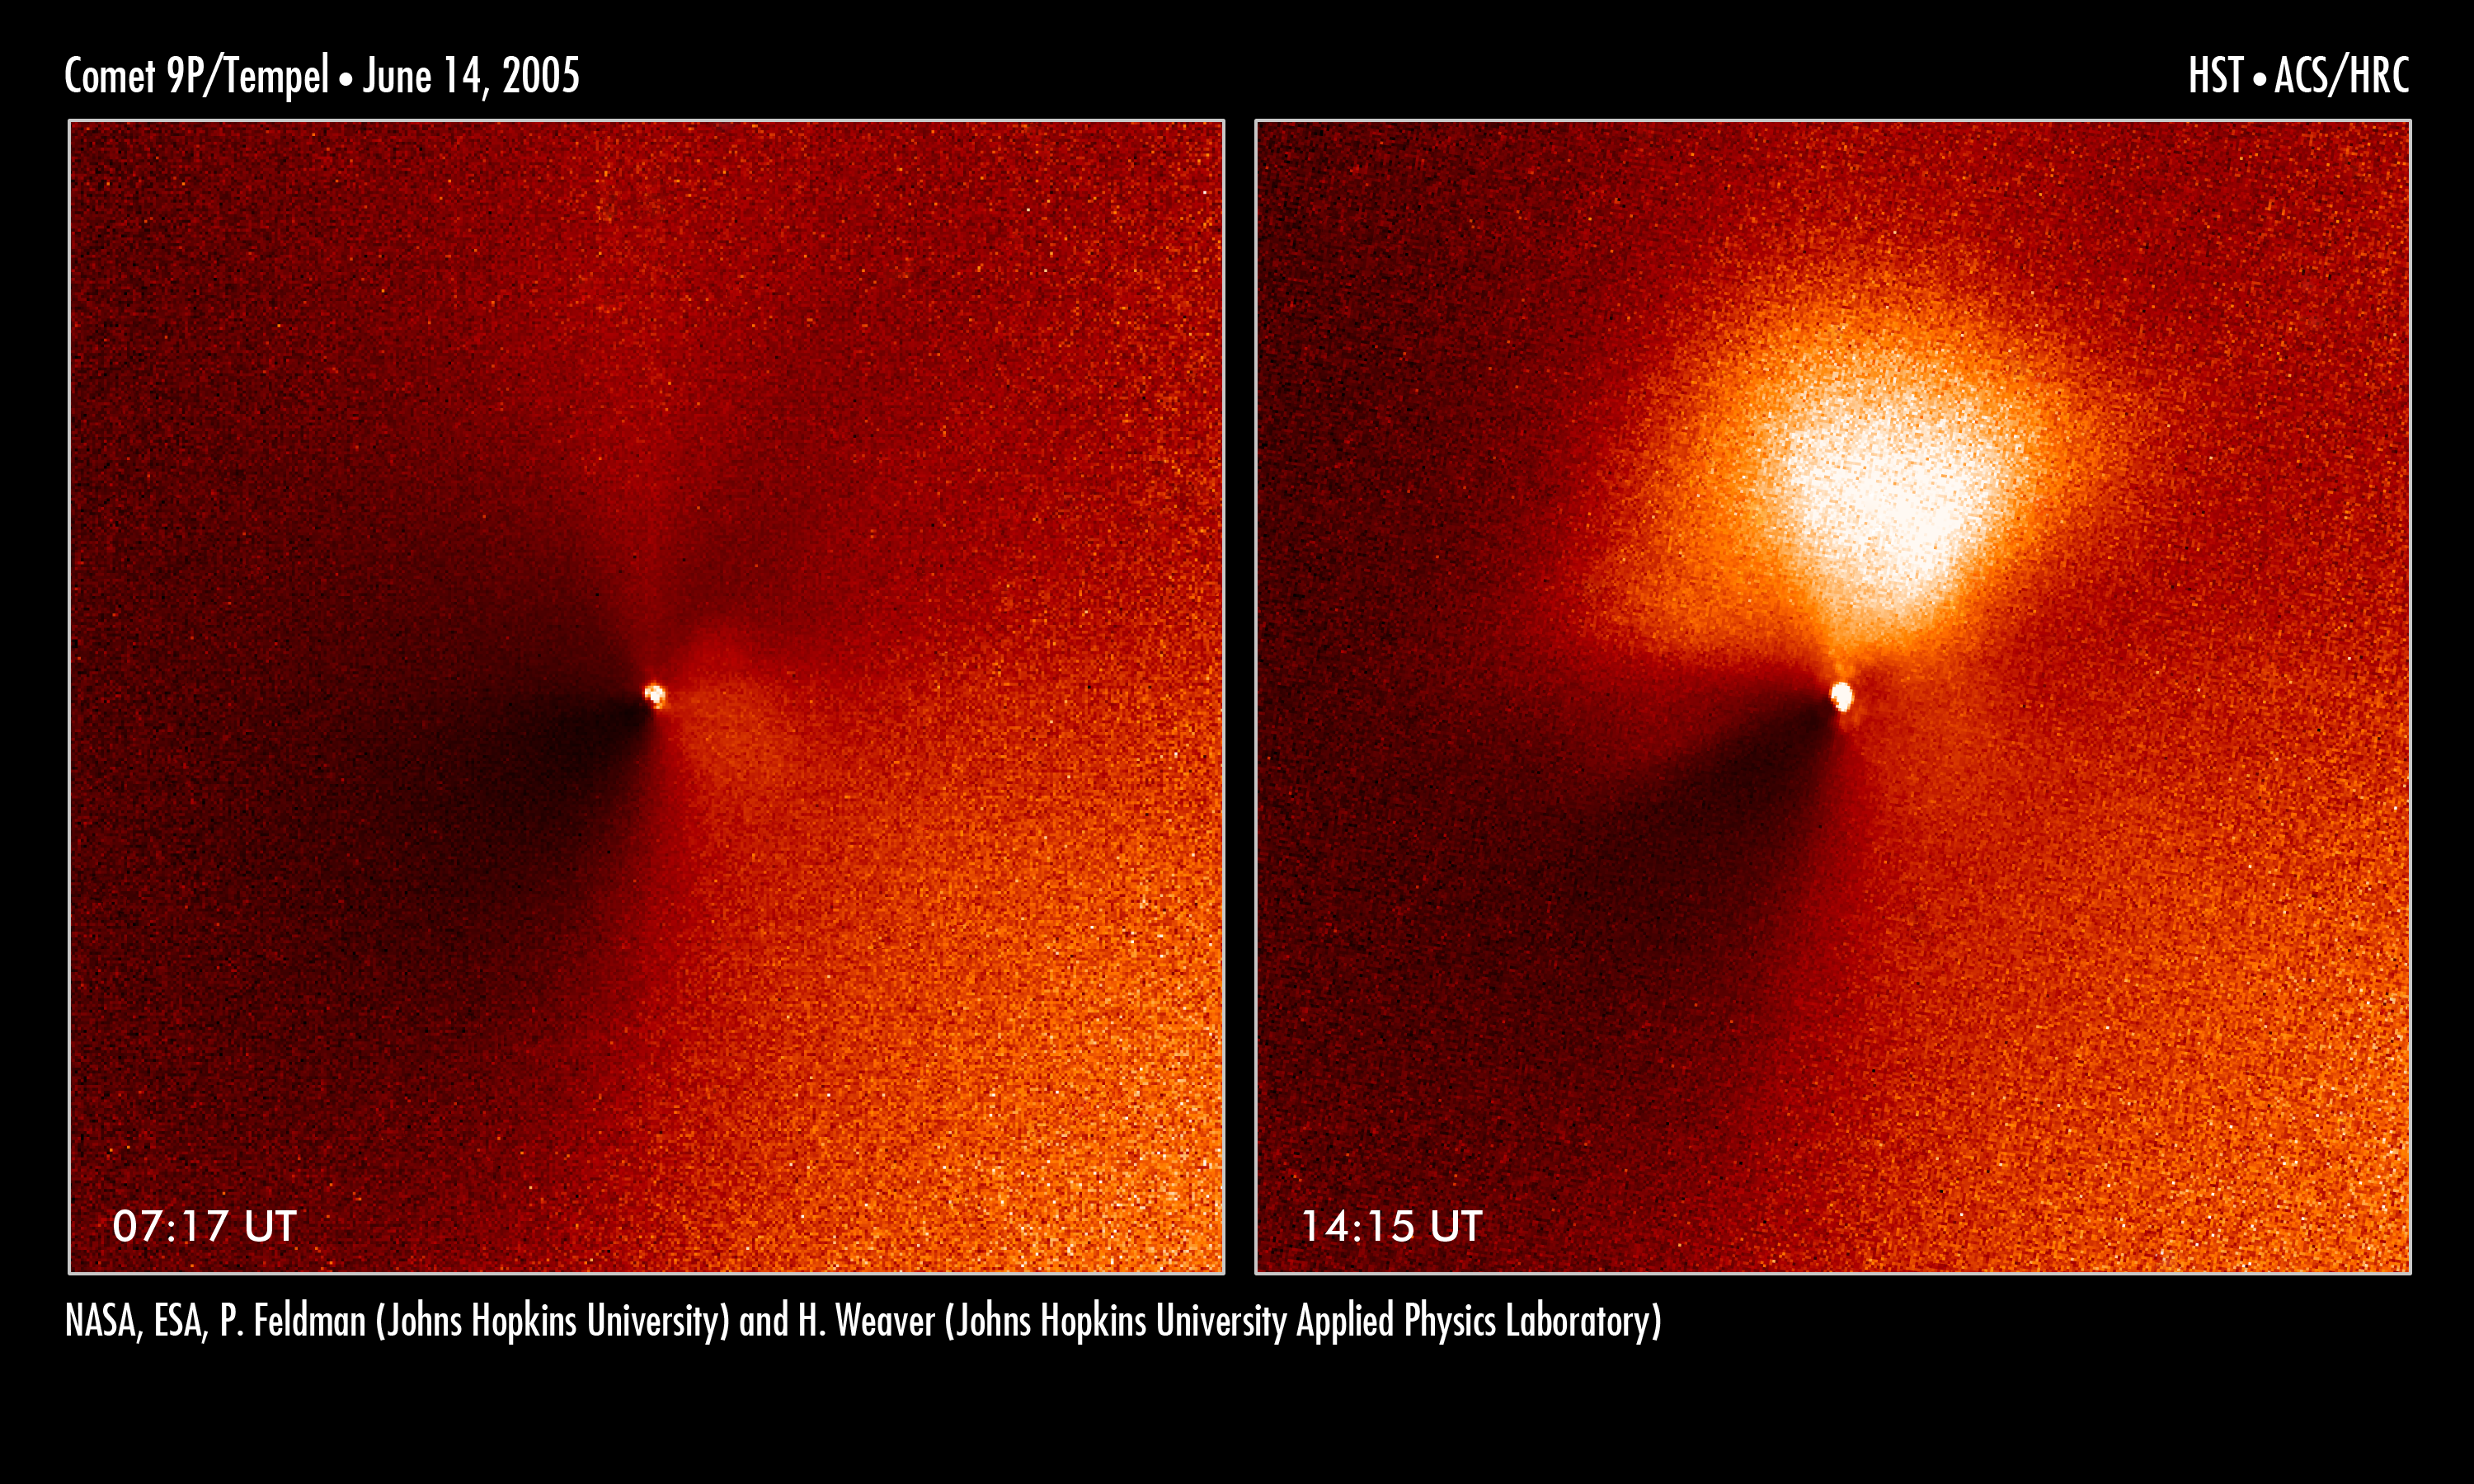

Hubble captures outburst from comet targeted by Deep Impact

In a dress rehearsal for the rendezvous between NASA's Deep Impact spacecraft and comet 9P/Tempel 1, the Hubble Space Telescope captured dramatic images of a new jet of dust streaming from the icy comet.

The images are a reminder that Tempel 1's icy nucleus, roughly the size of central Paris, is dynamic and volatile. Astronomers hope the eruption of dust seen in these observations is a preview of the fireworks that may come 4 July, when a probe from the Deep Impact spacecraft will slam into the comet, possibly blasting off material and giving rise to a similar dust plume.

These observations demonstrate that Hubble's sharp "eye" can see exquisite details of the comet's temperamental activities. The Earth-orbiting observatory was 120 million kilometres away from the comet when these images were taken by the Advanced Camera for Surveys' High Resolution Camera. The telescope's views complement close-up images being taken by cameras aboard Deep Impact, which is speeding toward the comet.

The two images, taken seven hours apart on 14 June, show Tempel 1 and its new jet. The image at left, taken at 7:17 a.m. (UT), is a view of the comet before the outburst. The bright dot is light reflecting from the comet's nucleus, which appears star-like in these images because it is too small even for Hubble to resolve. The nucleus, a potato-shaped object, is 14 kilometres wide and 4 kilometres long. Hubble's viewing the nucleus is as difficult as someone trying to spot a potato in Stockholm from Madrid.

The photo at right, snapped at 14:15 a.m. (UT), reveals the jet [the bright fan-shaped area]. The jet extends about 2,200 kilometers, which is roughly the distance from Copenhagen to Athens. It is pointing in the direction of the Sun. Comets frequently show outbursts in activity, but astronomers still don't know exactly why they occur. Tempel 1 has been moving closer to the Sun, and perhaps the increasing heat opened up a crack in the comet's dark, crusty surface. Dust and gas trapped beneath the surface could then spew out of the crack, forming a jet. Or, perhaps a portion of the crust itself was lifted off the nucleus by the pressure of heated gases beneath the surface. This porous crust might then crumble into small dust particles shortly after leaving the nucleus, producing a fan-shaped coma on the sunward side. Whatever the cause, the new feature may not last for long.

Astronomers hope that the July 4 collision will unleash more primordial material trapped inside the comet, which formed billions of years ago. Comets are thought to be "dirty snowballs", porous agglomerates of ice and rock that dwell in the frigid outer boundaries of our solar system. Periodically, they make their journey into the inner solar system as they loop around the Sun.

The contrast in these images has been enhanced to highlight the brightness of the new jet.

Credit: NASA, ESA, P. Feldman (Johns Hopkins University), and H. Weaver (Applied Physics Lab)